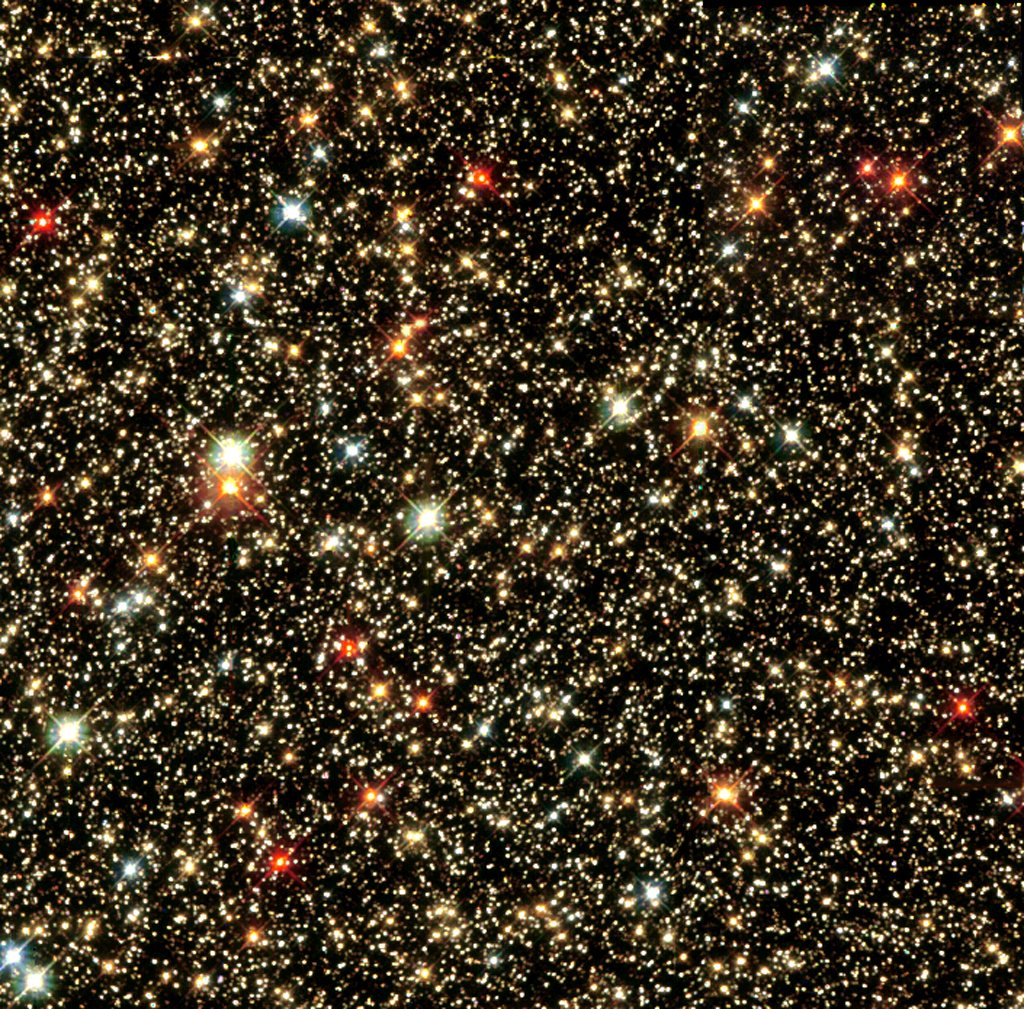

A sky full of glittering jewels

The NASA/ESA Hubble Space Telescope has given us a keyhole view towards the heart of our Milky Way Galaxy, where a dazzling array of stars reside. Most of the view of our galaxy is obscured by dust. Hubble peered into the Sagittarius Star Cloud, a narrow, dust-free region, providing this spectacular glimpse of a treasure chest full of stars. Some of these gems are among the oldest inhabitants of our galaxy. By studying the older stars that pack our Milky Way's hub, scientists can learn more about the evolution of our galaxy.

Credit: Hubble Heritage Team (AURA/STScI/NASA/ESA)